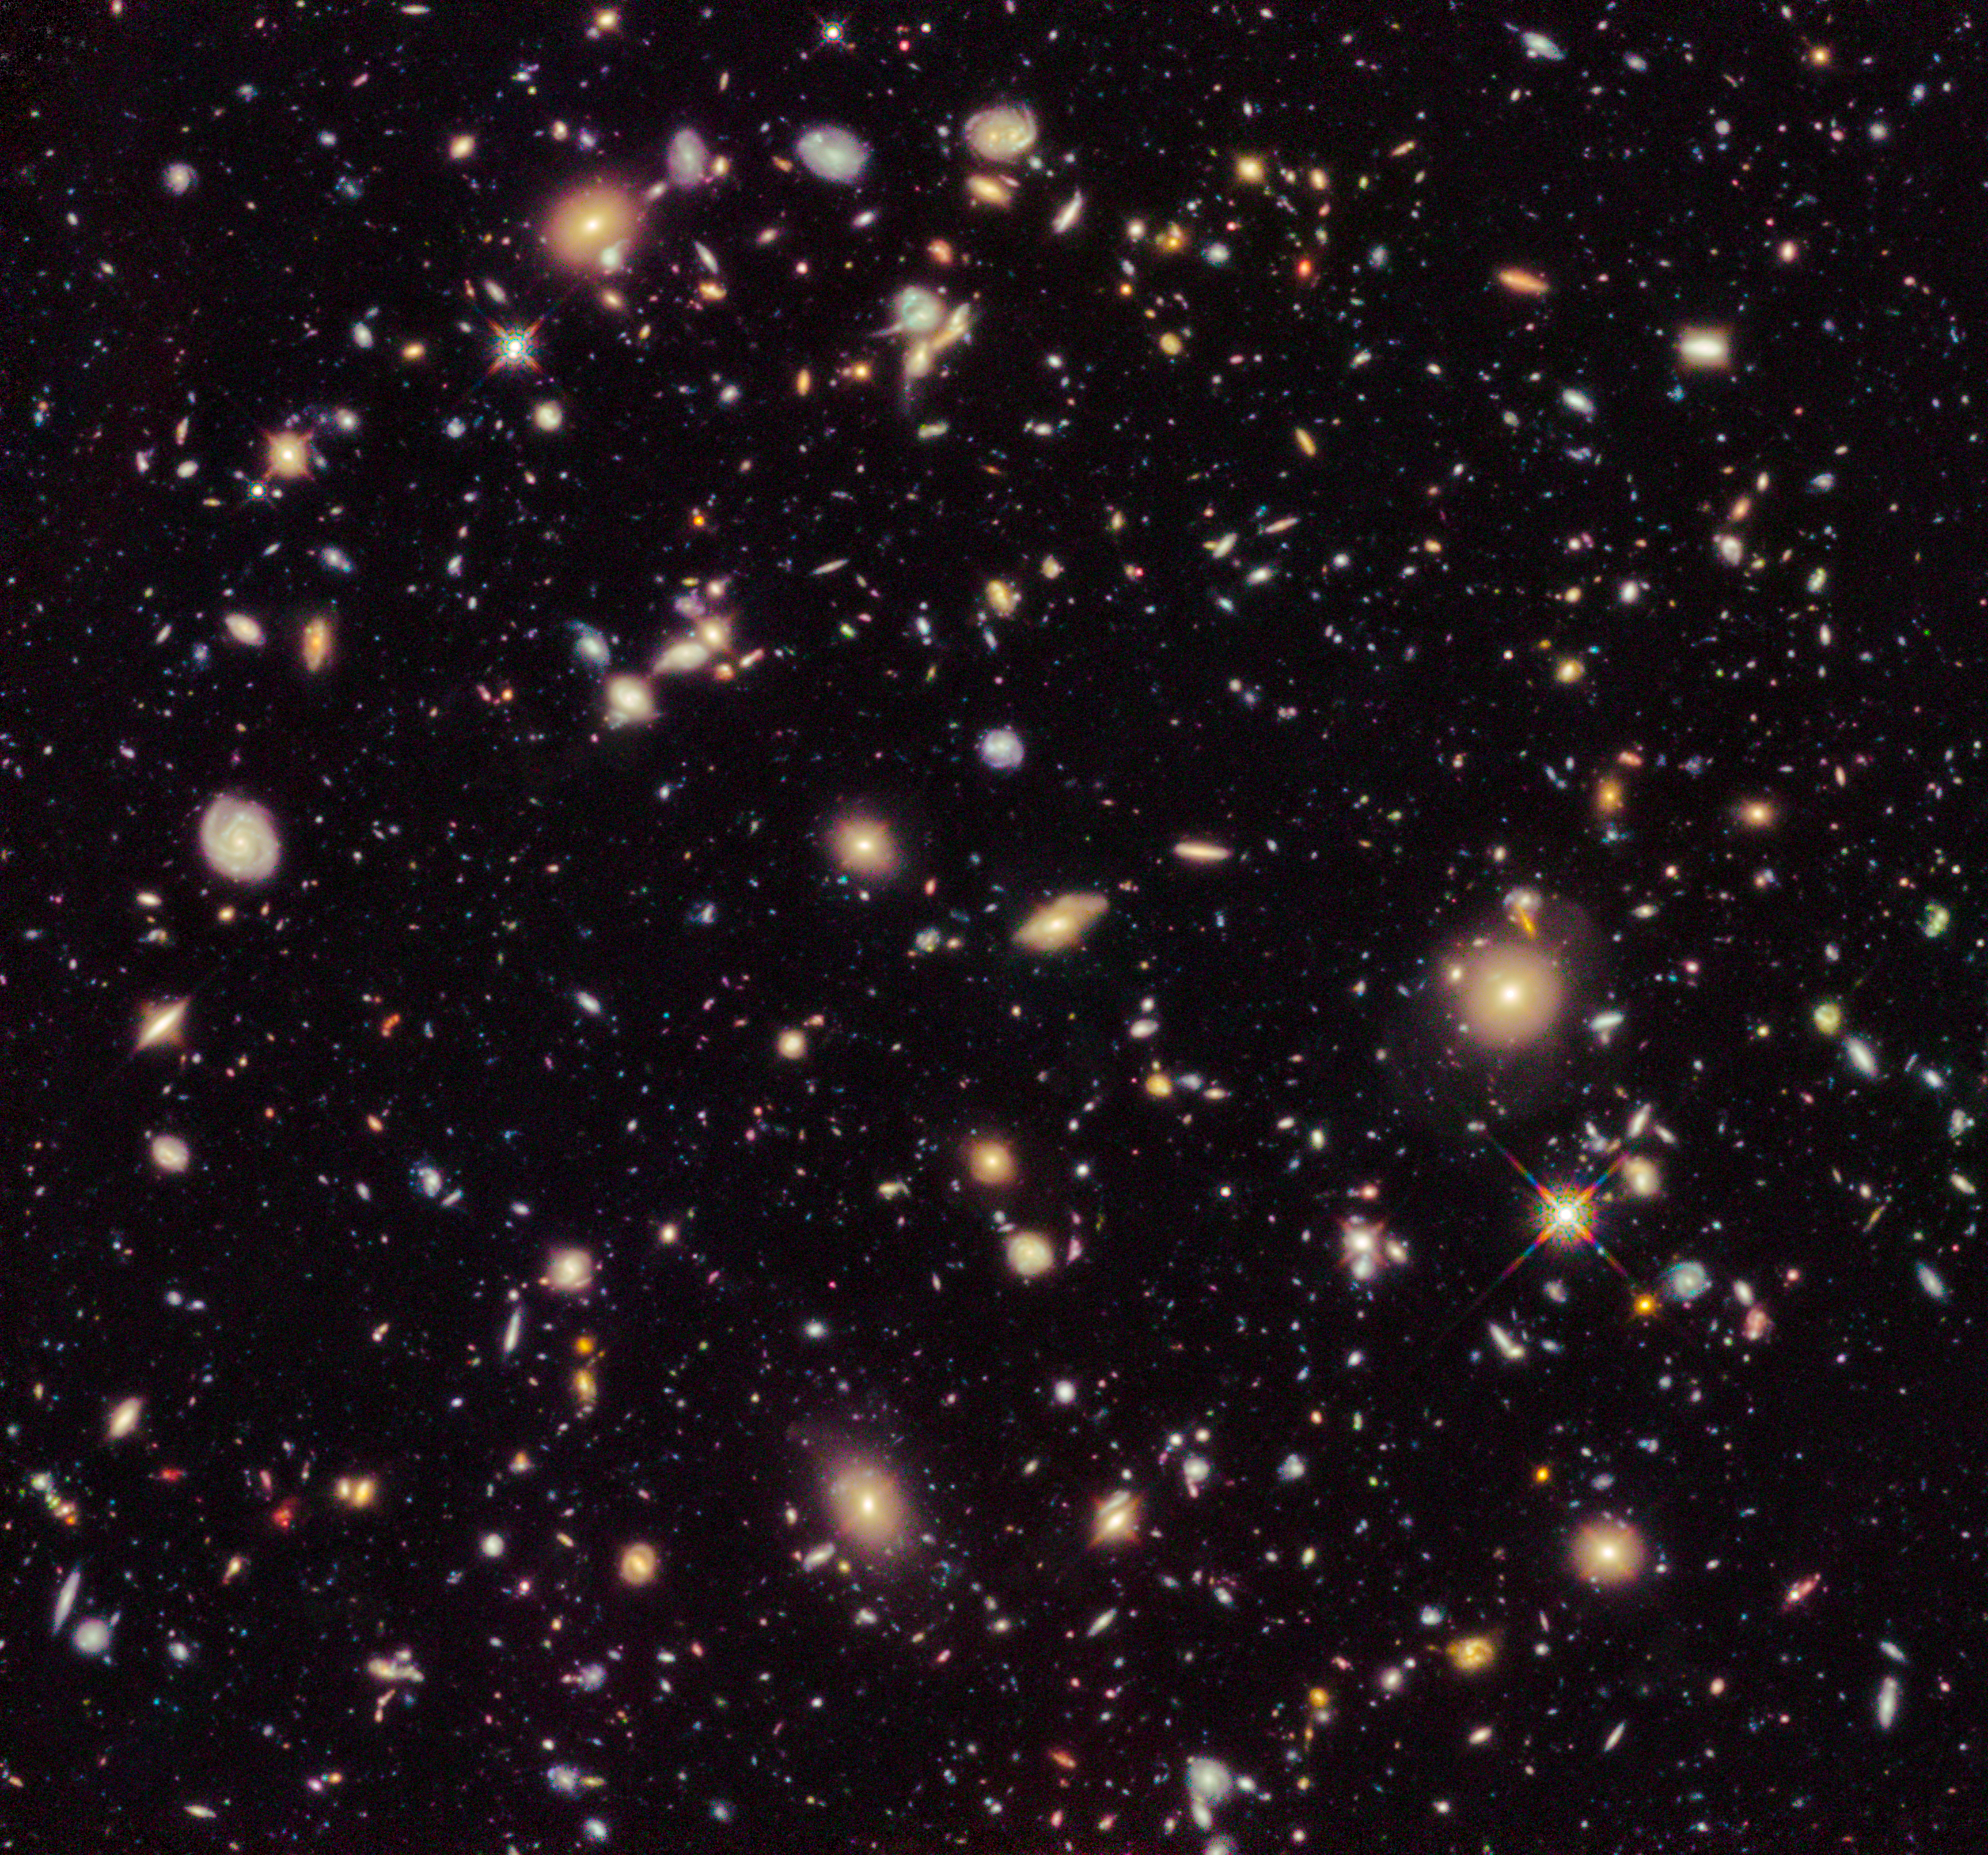

The Hubble Ultra Deep Field 2012

This image shows the Hubble Ultra Deep Field 2012, an improved version of the Hubble Ultra Deep Field image featuring additional observation time. The new data have revealed for the first time a population of distant galaxies at redshifts between 9 and 12, including the most distant object observed to date.

These galaxies will require confirmation using spectroscopy by the forthcoming NASA/ESA/CSA James Webb Space Telescope before they are considered to be fully confirmed.

Credit: NASA, ESA, R. Ellis (Caltech), and the HUDF 2012 Team